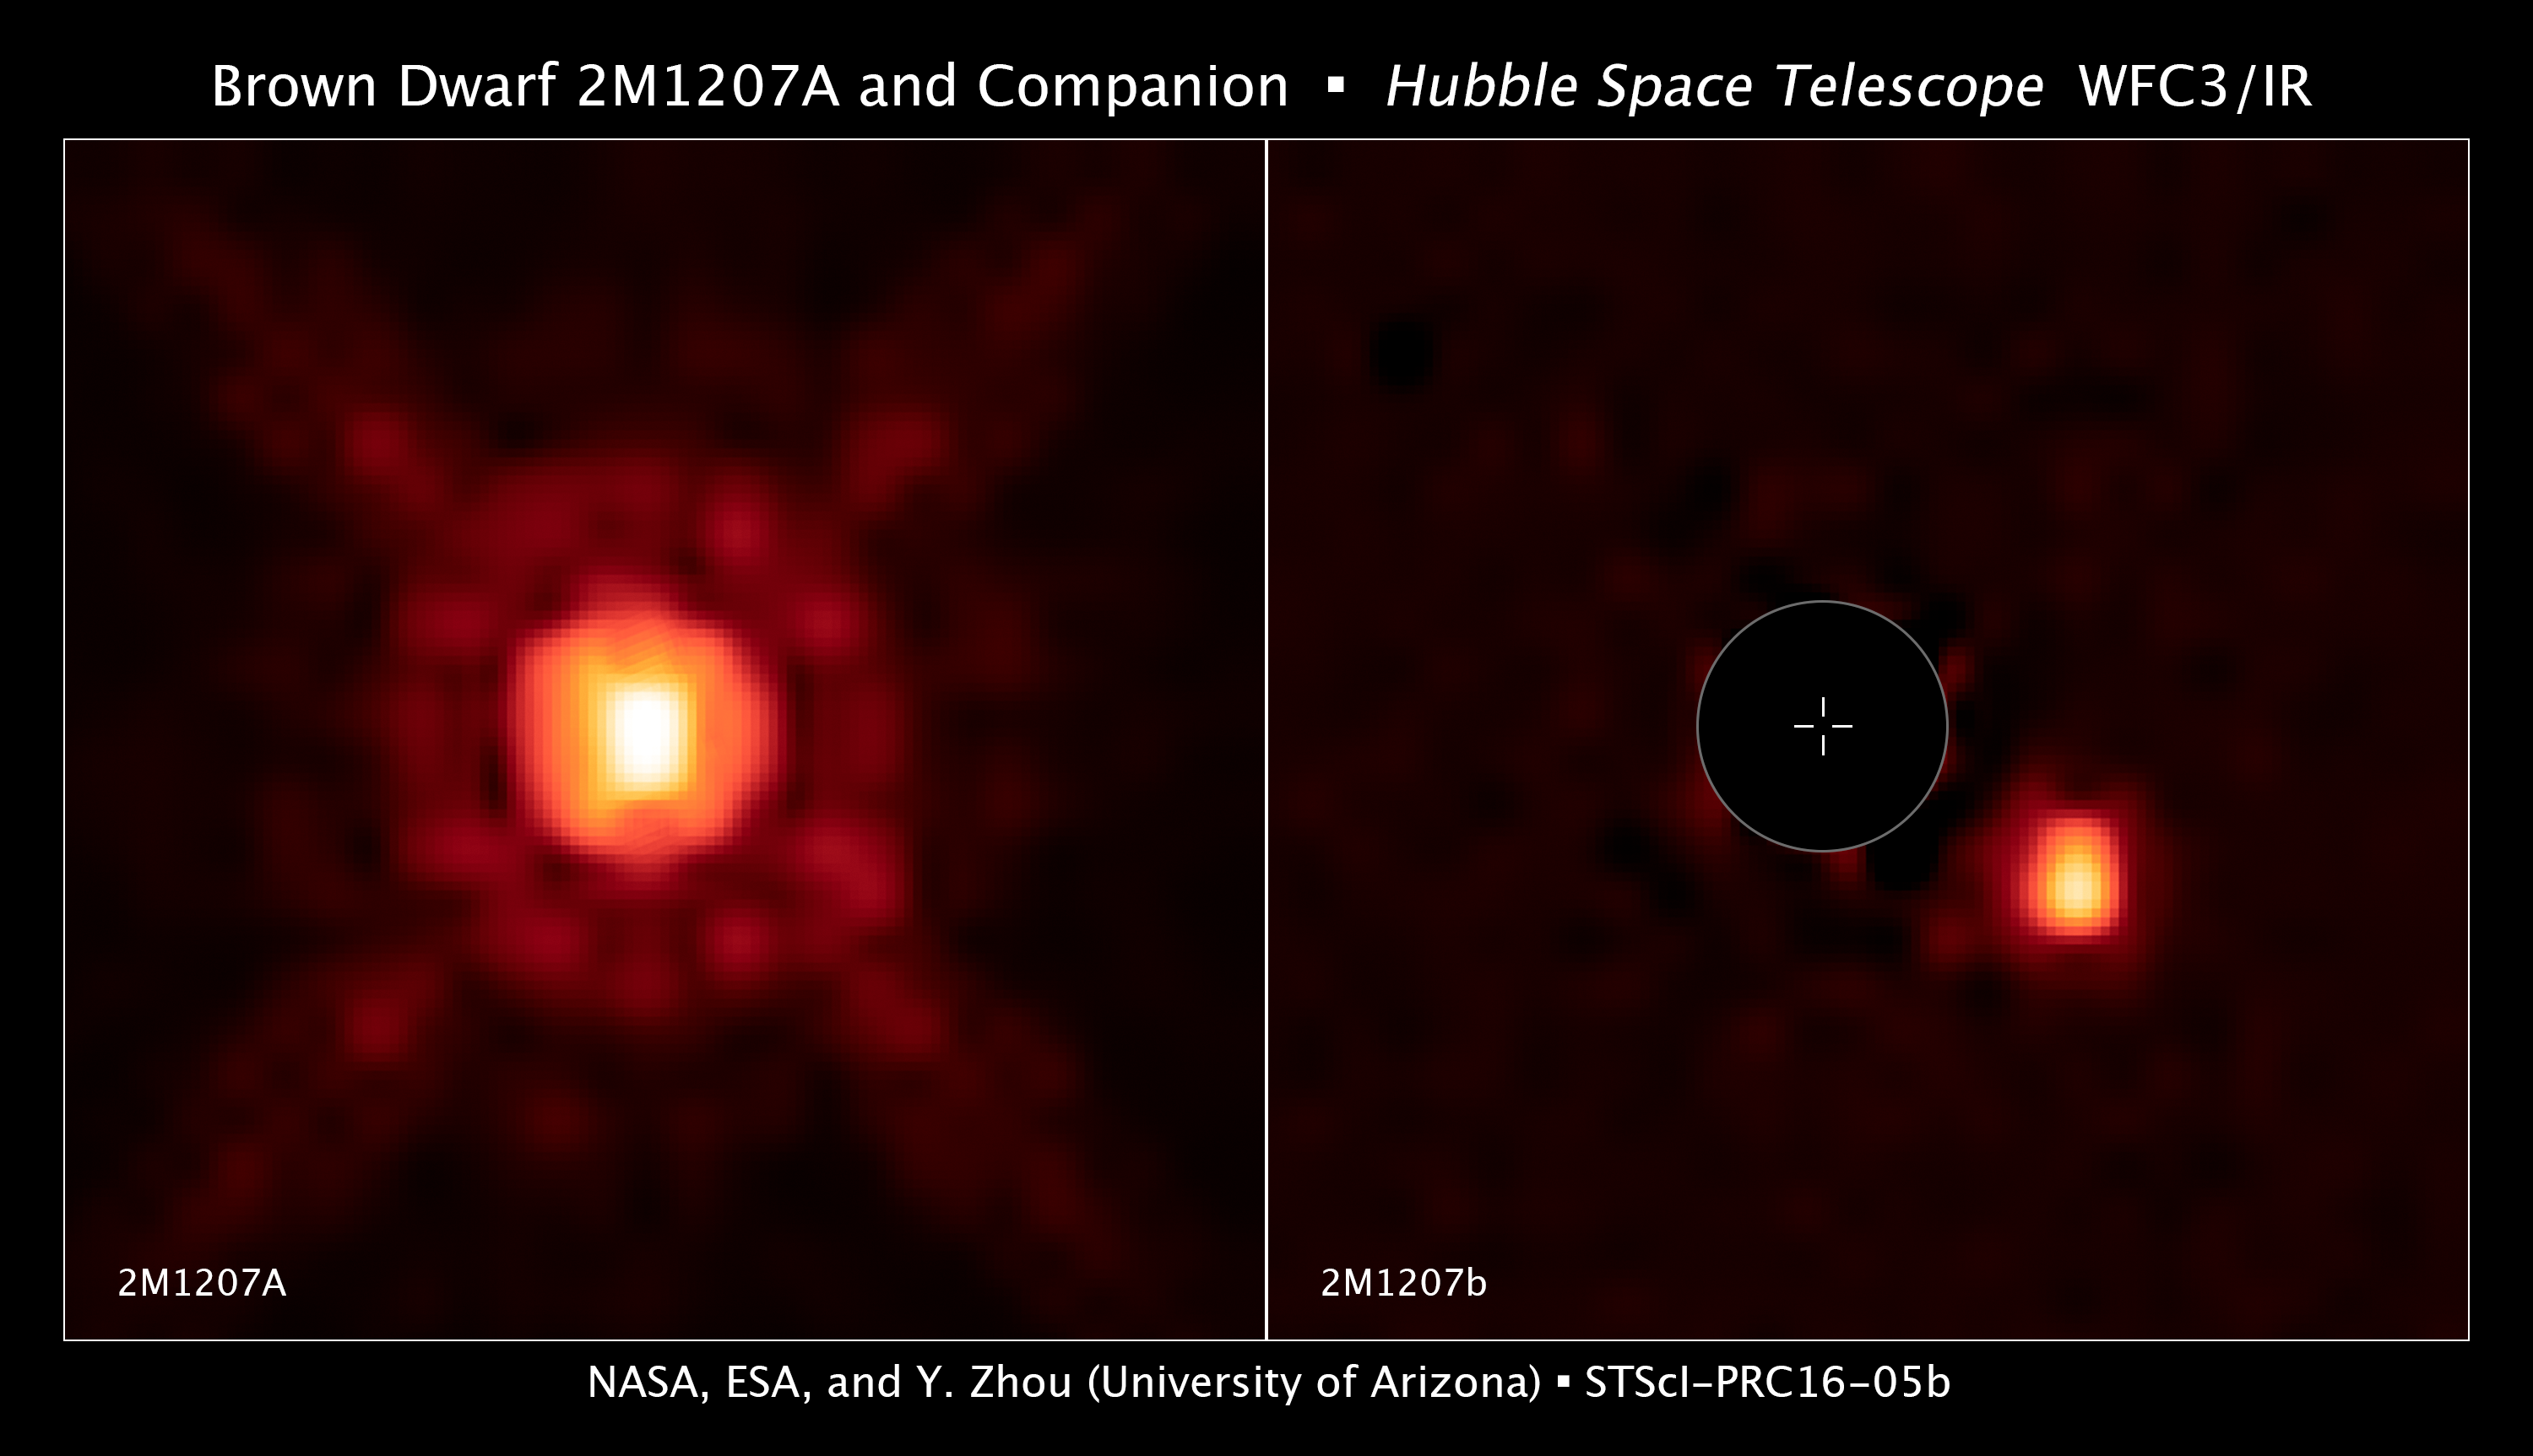

Brown Dwarf 2M1207A and Companion

[Left] — This image, taken with the NASA/ESA Hubble Space Telescope, shows a near-infrared-light image of a brown dwarf located 170 light-years away from Earth. The object is no more than 30 times the mass of Jupiter, making it too small to sustain nuclear fusion to shine as a star.

[Right] — When the glow of the brown dwarf is subtracted from the image, a smaller and fainter companion object becomes visible. No more that four times the mass of Jupiter, this companion is dubbed a super-Jupiter. It has an estimated diameter as big as 40 percent greater than Jupiter's diameter. The world is 8 billion kilometres from the brown dwarf, nearly twice the distance between our sun and the planet Neptune.

Because the planet is only 10 million years old, it is so hot it may rain molten glass and iron in its atmosphere. Hubble has measured fluctuations in the planet's brightness that suggests the planet has patchy clouds as it completes one rotation every 10 hours.

Credit: NASA, ESA, and Y. Zhou (University of Arizona)